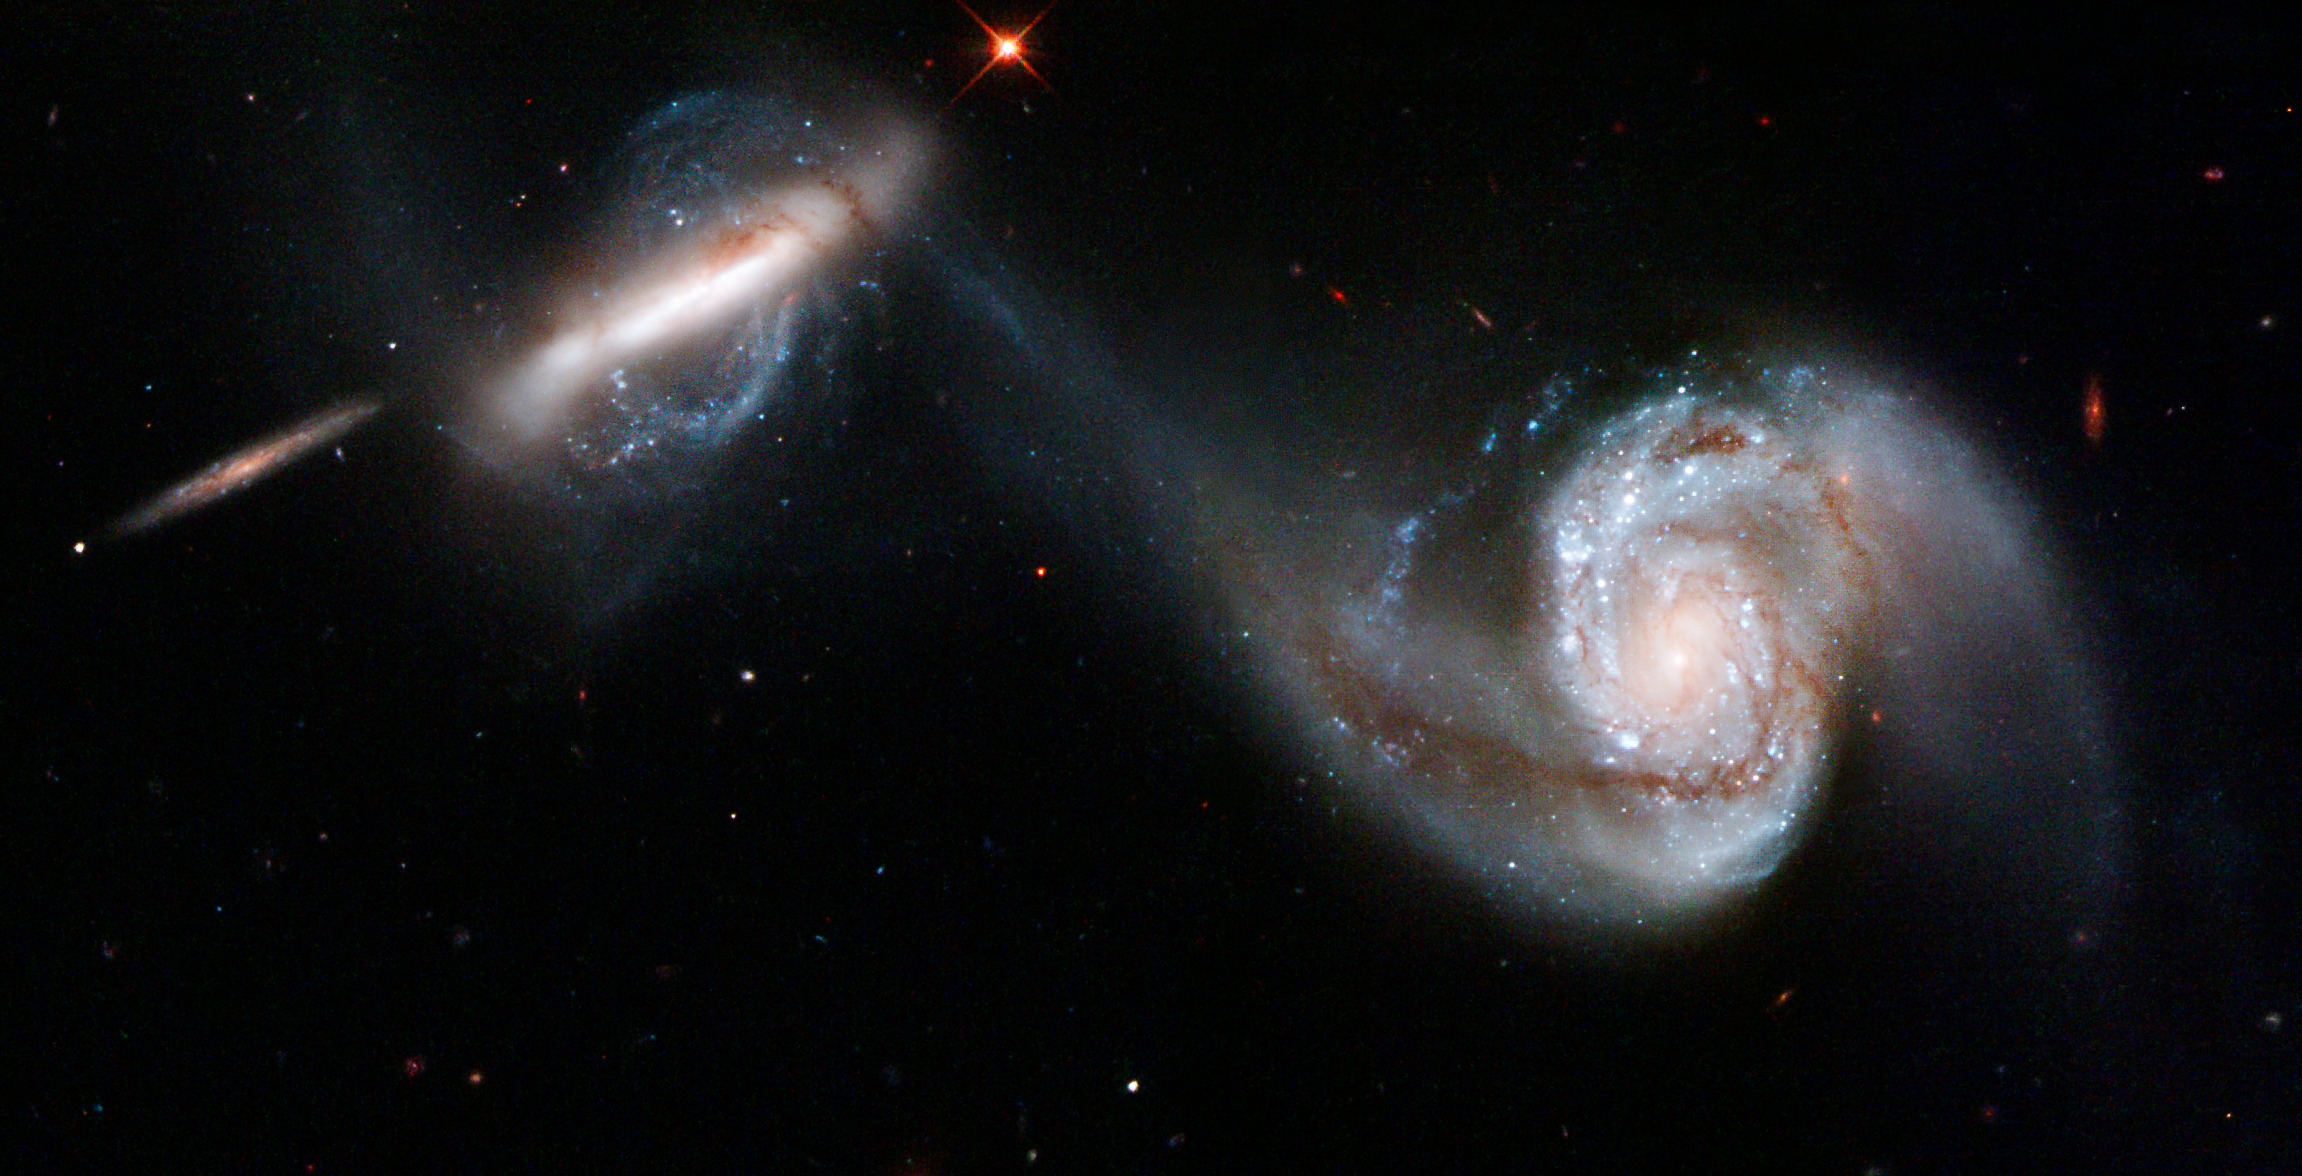

Arp 87

Arp 87 is a stunning pair of interacting galaxies. Stars, gas, and dust flow from the large spiral galaxy, NGC 3808, forming an enveloping arm around its companion. The shapes of both galaxies have been distorted by their gravitational interaction. Arp 87 is located in the constellation of Leo, the Lion, approximately 300 million light-years away from Earth. Arp 87 appears in Arp's Atlas of Peculiar Galaxies. As also seen in similar interacting galaxies, the corkscrew shape of the tidal material suggests that some stars and gas drawn from the larger galaxy have been caught in the gravitational pull of the smaller one. This image was taken in February 2007 with Hubble's Wide Field Planetary Camera 2 detector.

Credit: NASA, ESA, and The Hubble Heritage Team (STScI/AURA)